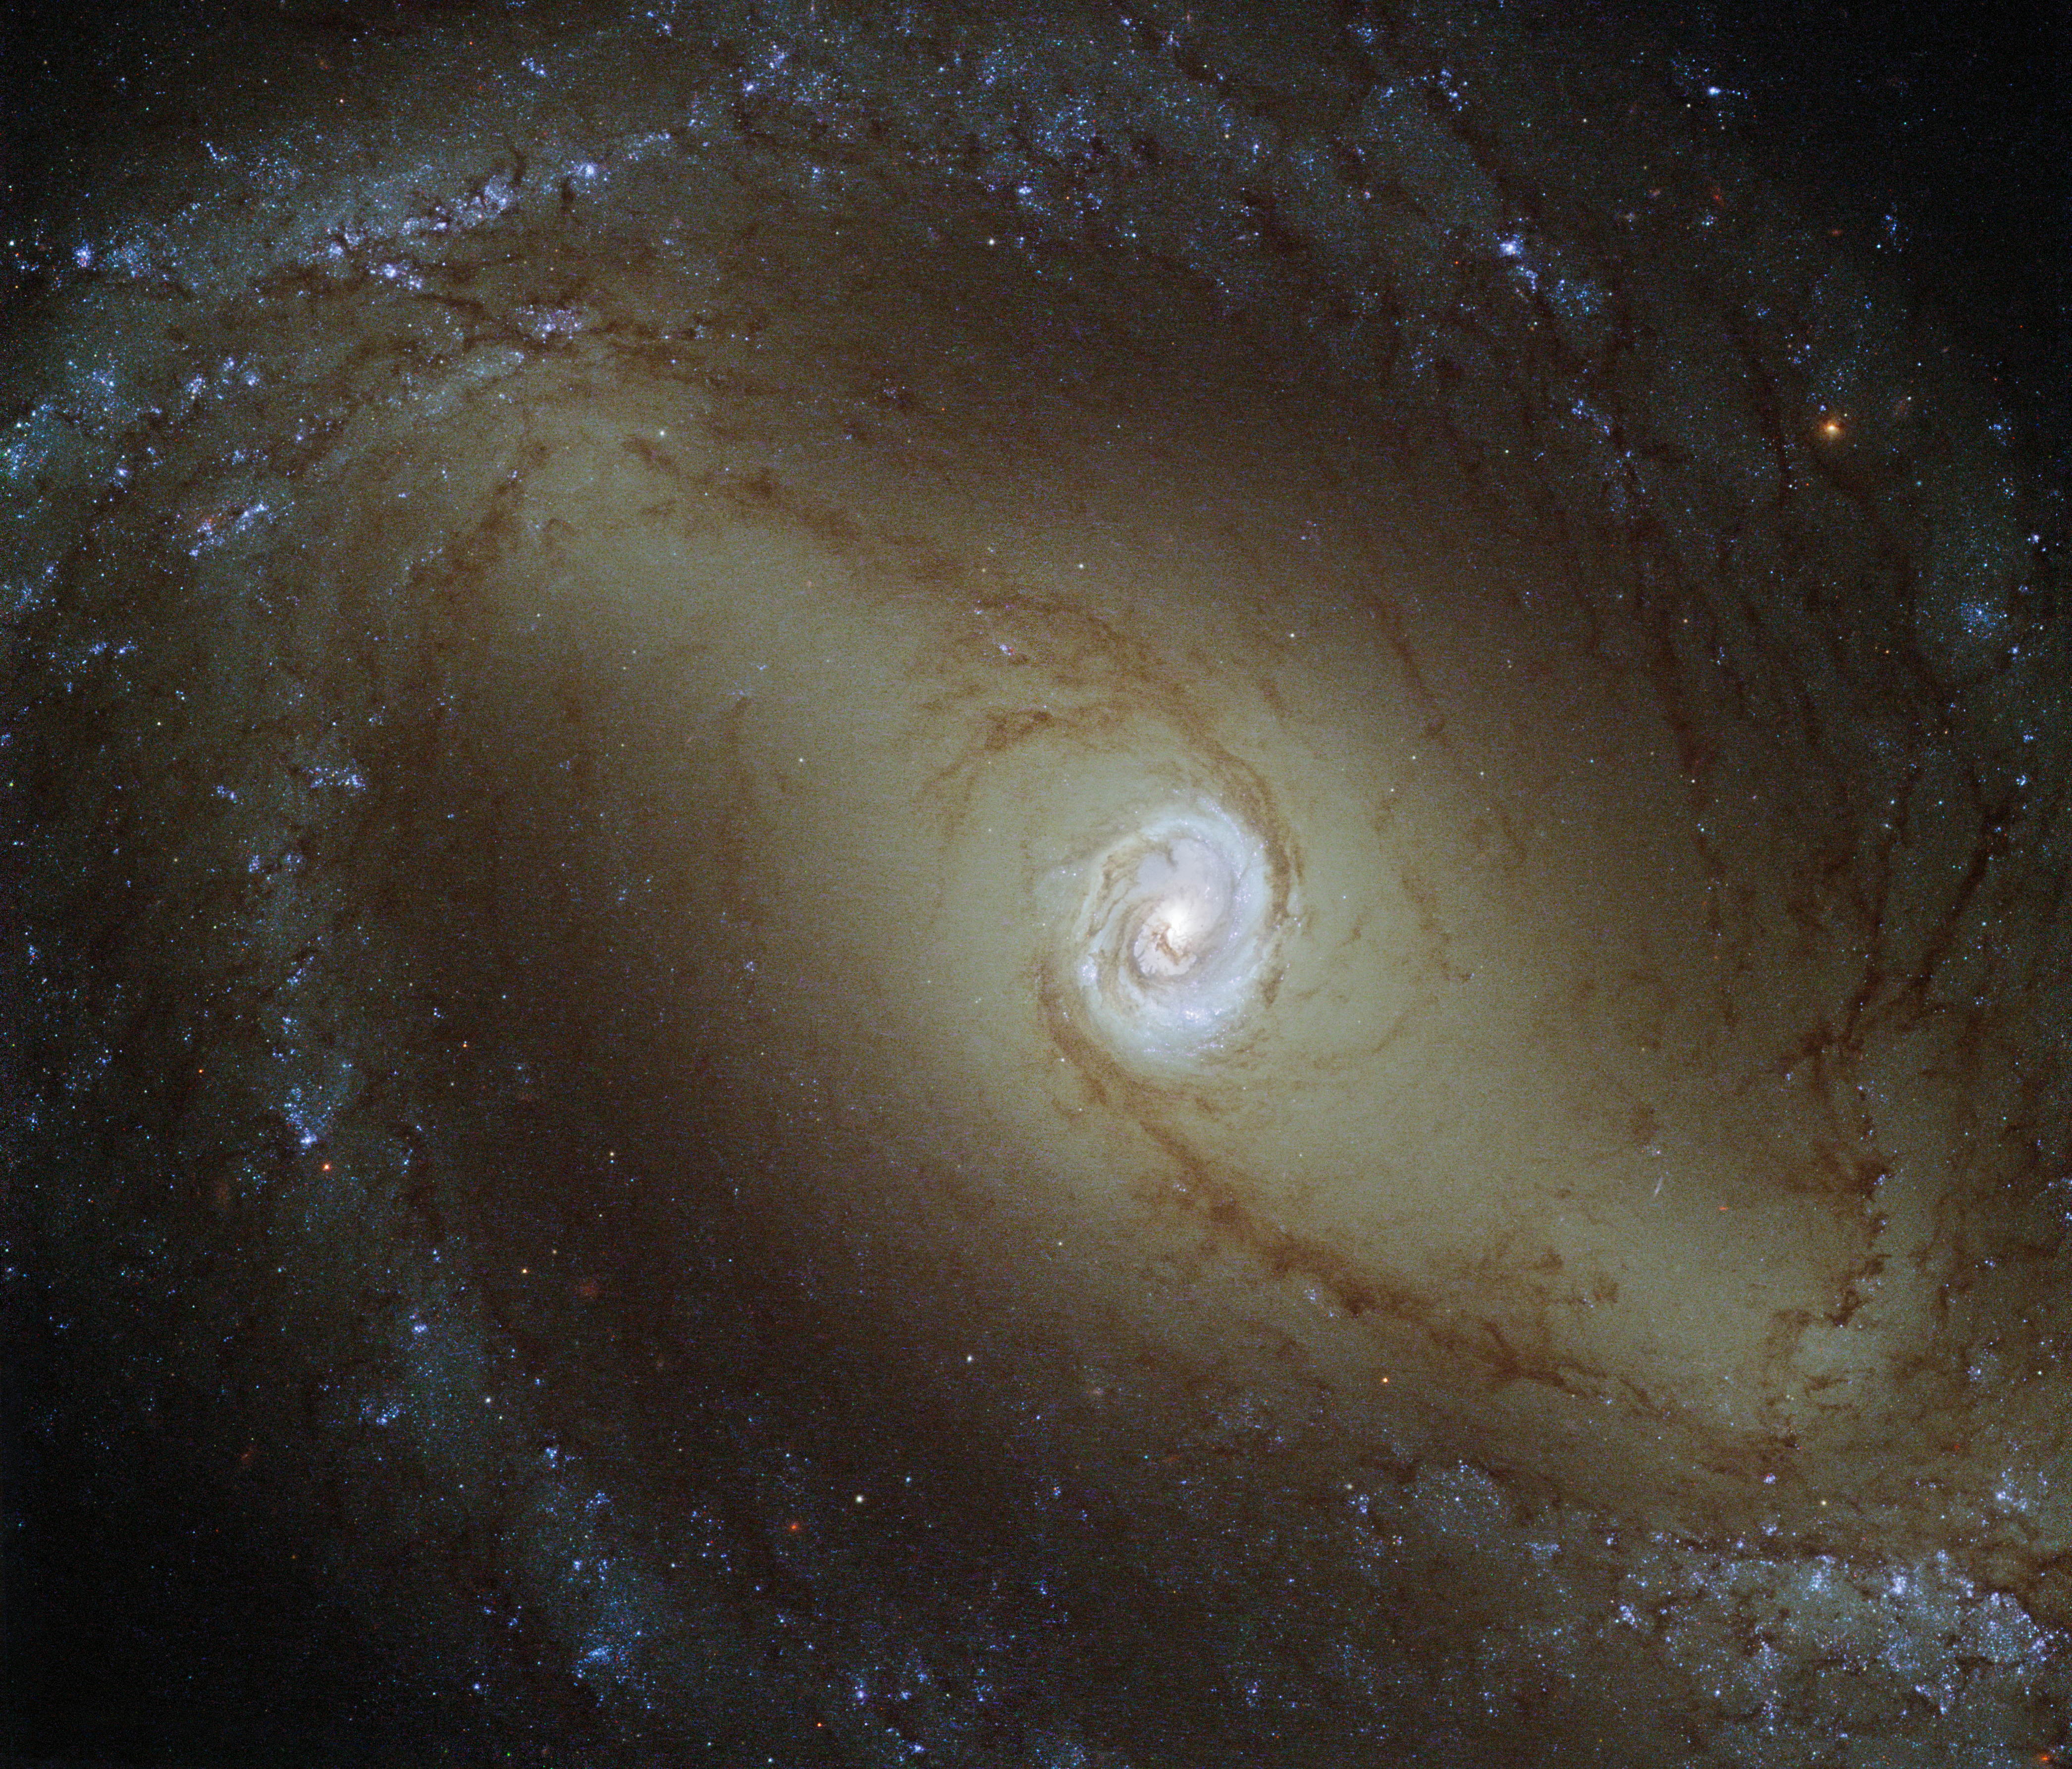

A galaxy with a glowing heart

This view, captured by the NASA/ESA Hubble Space Telescope, shows a nearby spiral galaxy known as NGC 1433. At about 32 million light-years from Earth, it is a type of very active galaxy known as a Seyfert galaxy — a classification that accounts for 10% of all galaxies. They have very bright, luminous centres comparable to that of our galaxy, the Milky Way.

Galaxy cores are of great interest to astronomers. The centres of most, if not all, galaxies are thought to contain a supermassive black hole, surrounded by a disc of infalling material.

NGC 1433 is being studied as part of a survey of 50 nearby galaxies known as the Legacy ExtraGalactic UV Survey (LEGUS). Ultraviolet radiation is observed from galaxies, mainly tracing the most recently formed stars. In Seyfert galaxies, ultraviolet light is also thought to emanate from the accretion discs around their central black holes. Studying these galaxies in the ultraviolet part of the spectrum is incredibly useful to study how the gas is behaving near the black hole. This image was obtained using a mix of ultraviolet, visible, and infrared light.

LEGUS will study a full range of properties from a sample of galaxies, including their internal structure. This Hubble survey will provide a unique foundation for future observations with the James Webb Space Telescope (JWST) and the Atacama Large Millimeter/submillimeter Array (ALMA). ALMA has already caught unexpected results relating to the centre of NGC 1433, finding a surprising spiral structure in the molecular gas close to the centre of NGC 1433. The astronomers also found a jet of material flowing away from the black hole, extending for only 150 light-years — the smallest such molecular outflow ever observed in a galaxy beyond our own.

Credit: ESA/Hubble & NASA Acknowledgements: D. Calzetti (UMass) and the LEGUS Team